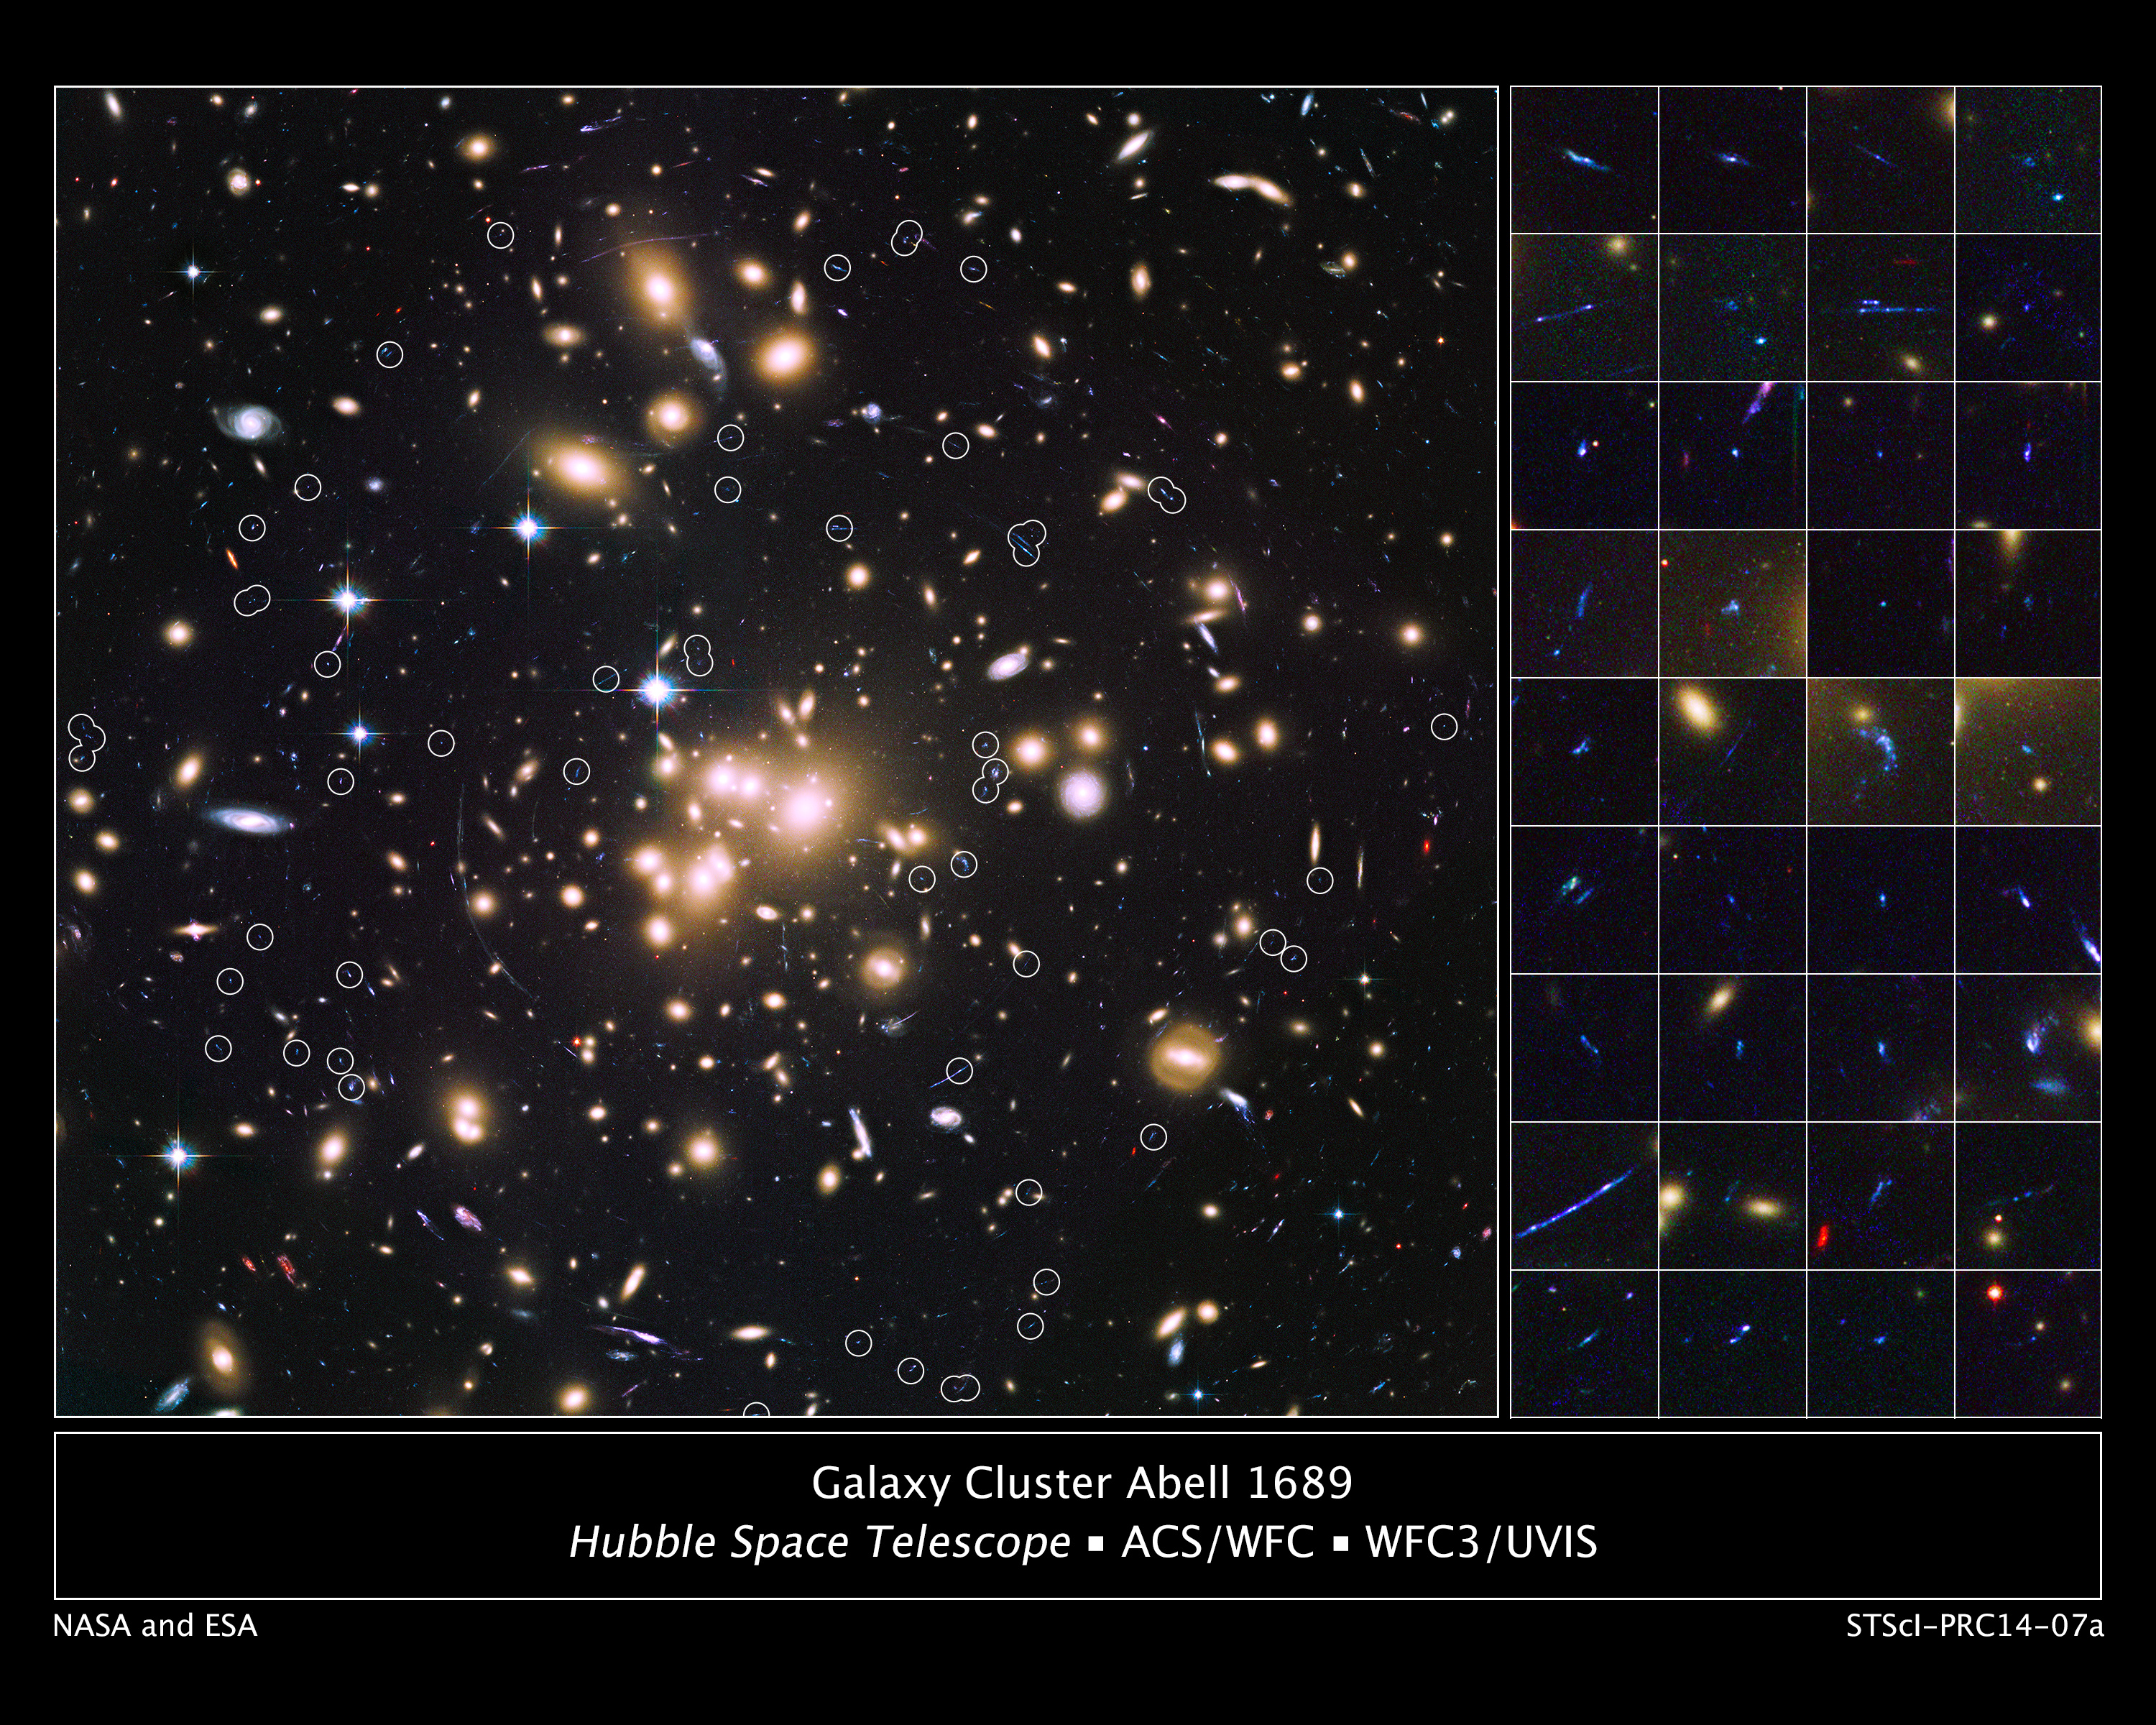

Galaxy cluster Abell 1689 and distant galaxies

Astronomers used the sharp eye of the NASA/ESA Hubble Space Telescope and the magnification power of the giant cluster of galaxies Abell 1689 to find 58 remote galaxies, which produced the bulk of new stars during the Universe's early years. They are the smallest, faintest, and most numerous galaxies ever seen in the remote Universe.

The white circles sprinkled throughout the image of the galaxy cluster on the left pinpoint the location of the magnified images of most of the faraway galaxies. The image is a blend of exposures taken by Hubble's Advanced Camera for Surveys and Wide Field Camera 3. Seeing the tiny galaxies mixed in with the cluster galaxies is an illusion. They are actually far away from Abell 1689. Hubble photographed the distant galaxies as they appeared more than 10 billion years ago, during the heyday of star birth.

The galaxies would normally be too faint for Hubble to see. To detect them, astronomers teamed Hubble with Abell 1689, which magnified the light from the galaxies behind it due to a phenomenon called gravitational lensing. Gravity warps space, acting like a giant funhouse mirror to stretch and brighten distant objects, allowing Hubble to resolve them.

The postage stamp-sized images on the right show 36 of the distant galaxies. Their bright blue colour reveals that they are ablaze with star birth. Hubble's Wide Field Camera 3 captured these images of the galaxies in ultraviolet light, a reliable tracer of star birth. The Hubble analysis shows that they are irregularly-shaped and measure just a few thousand light-years across. These galaxies are about one-tenth of the mass of the typical progenitors of galaxies like our Milky Way.

Abell 1689 is 2.5 billion light-years from Earth.

Credit: NASA, ESA, and B. Siana and A. Alavi (University of California, Riverside)